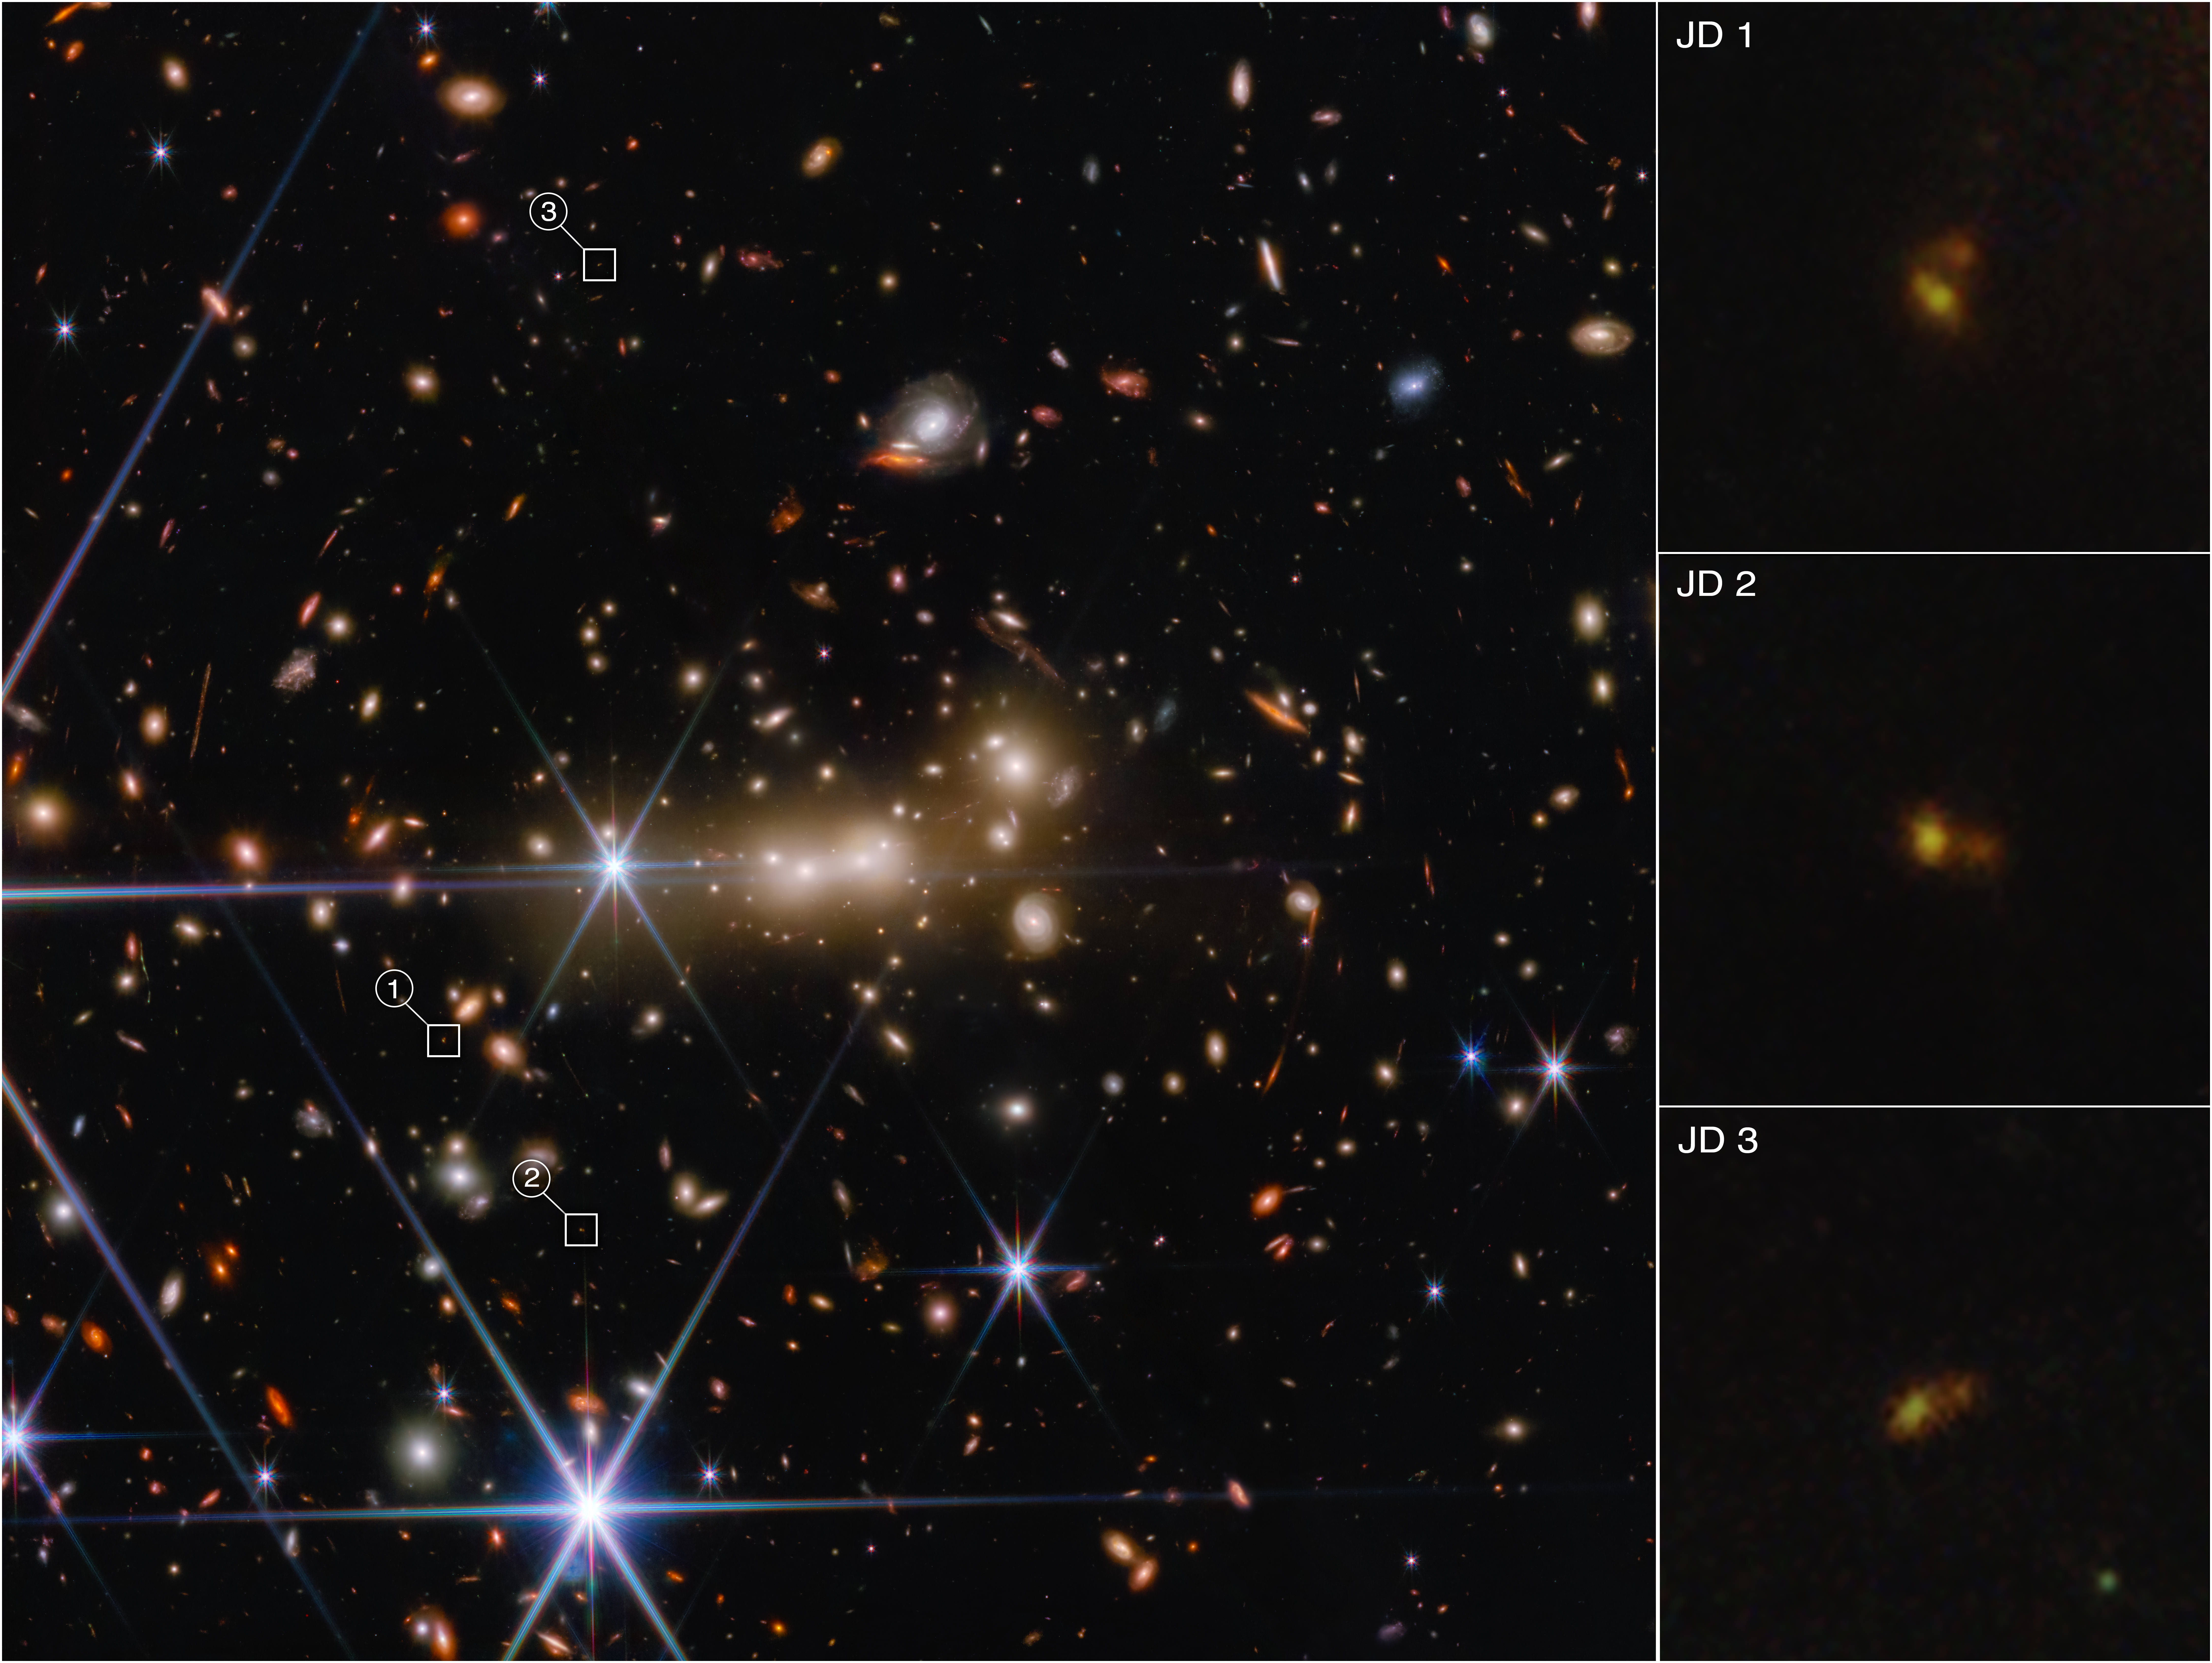

Webb Surprises Astronomers with Never-Before-Seen Details of the Early Universe

The massive gravity of galaxy cluster MACS0647 acts as a cosmic lens to bend and magnify light from the more distant MACS0647-JD system. It also triply lensed the JD system, causing its image to appear in three separate locations. These images, which are highlighted with white boxes, are marked JD1, JD2, and JD3. MACS0647-JD has a redshift of about 11, which puts it in the first 400 million years after the Big Bang. The long, diagonal line traversing the image is a diffraction spike from a bright star located just off the frame.

Note: This image depicts data from Webb science in progress, which has not yet been through the peer-review process.

Credit: NASA, ESA, CSA, and STScI, Alyssa Pagan (STScI)